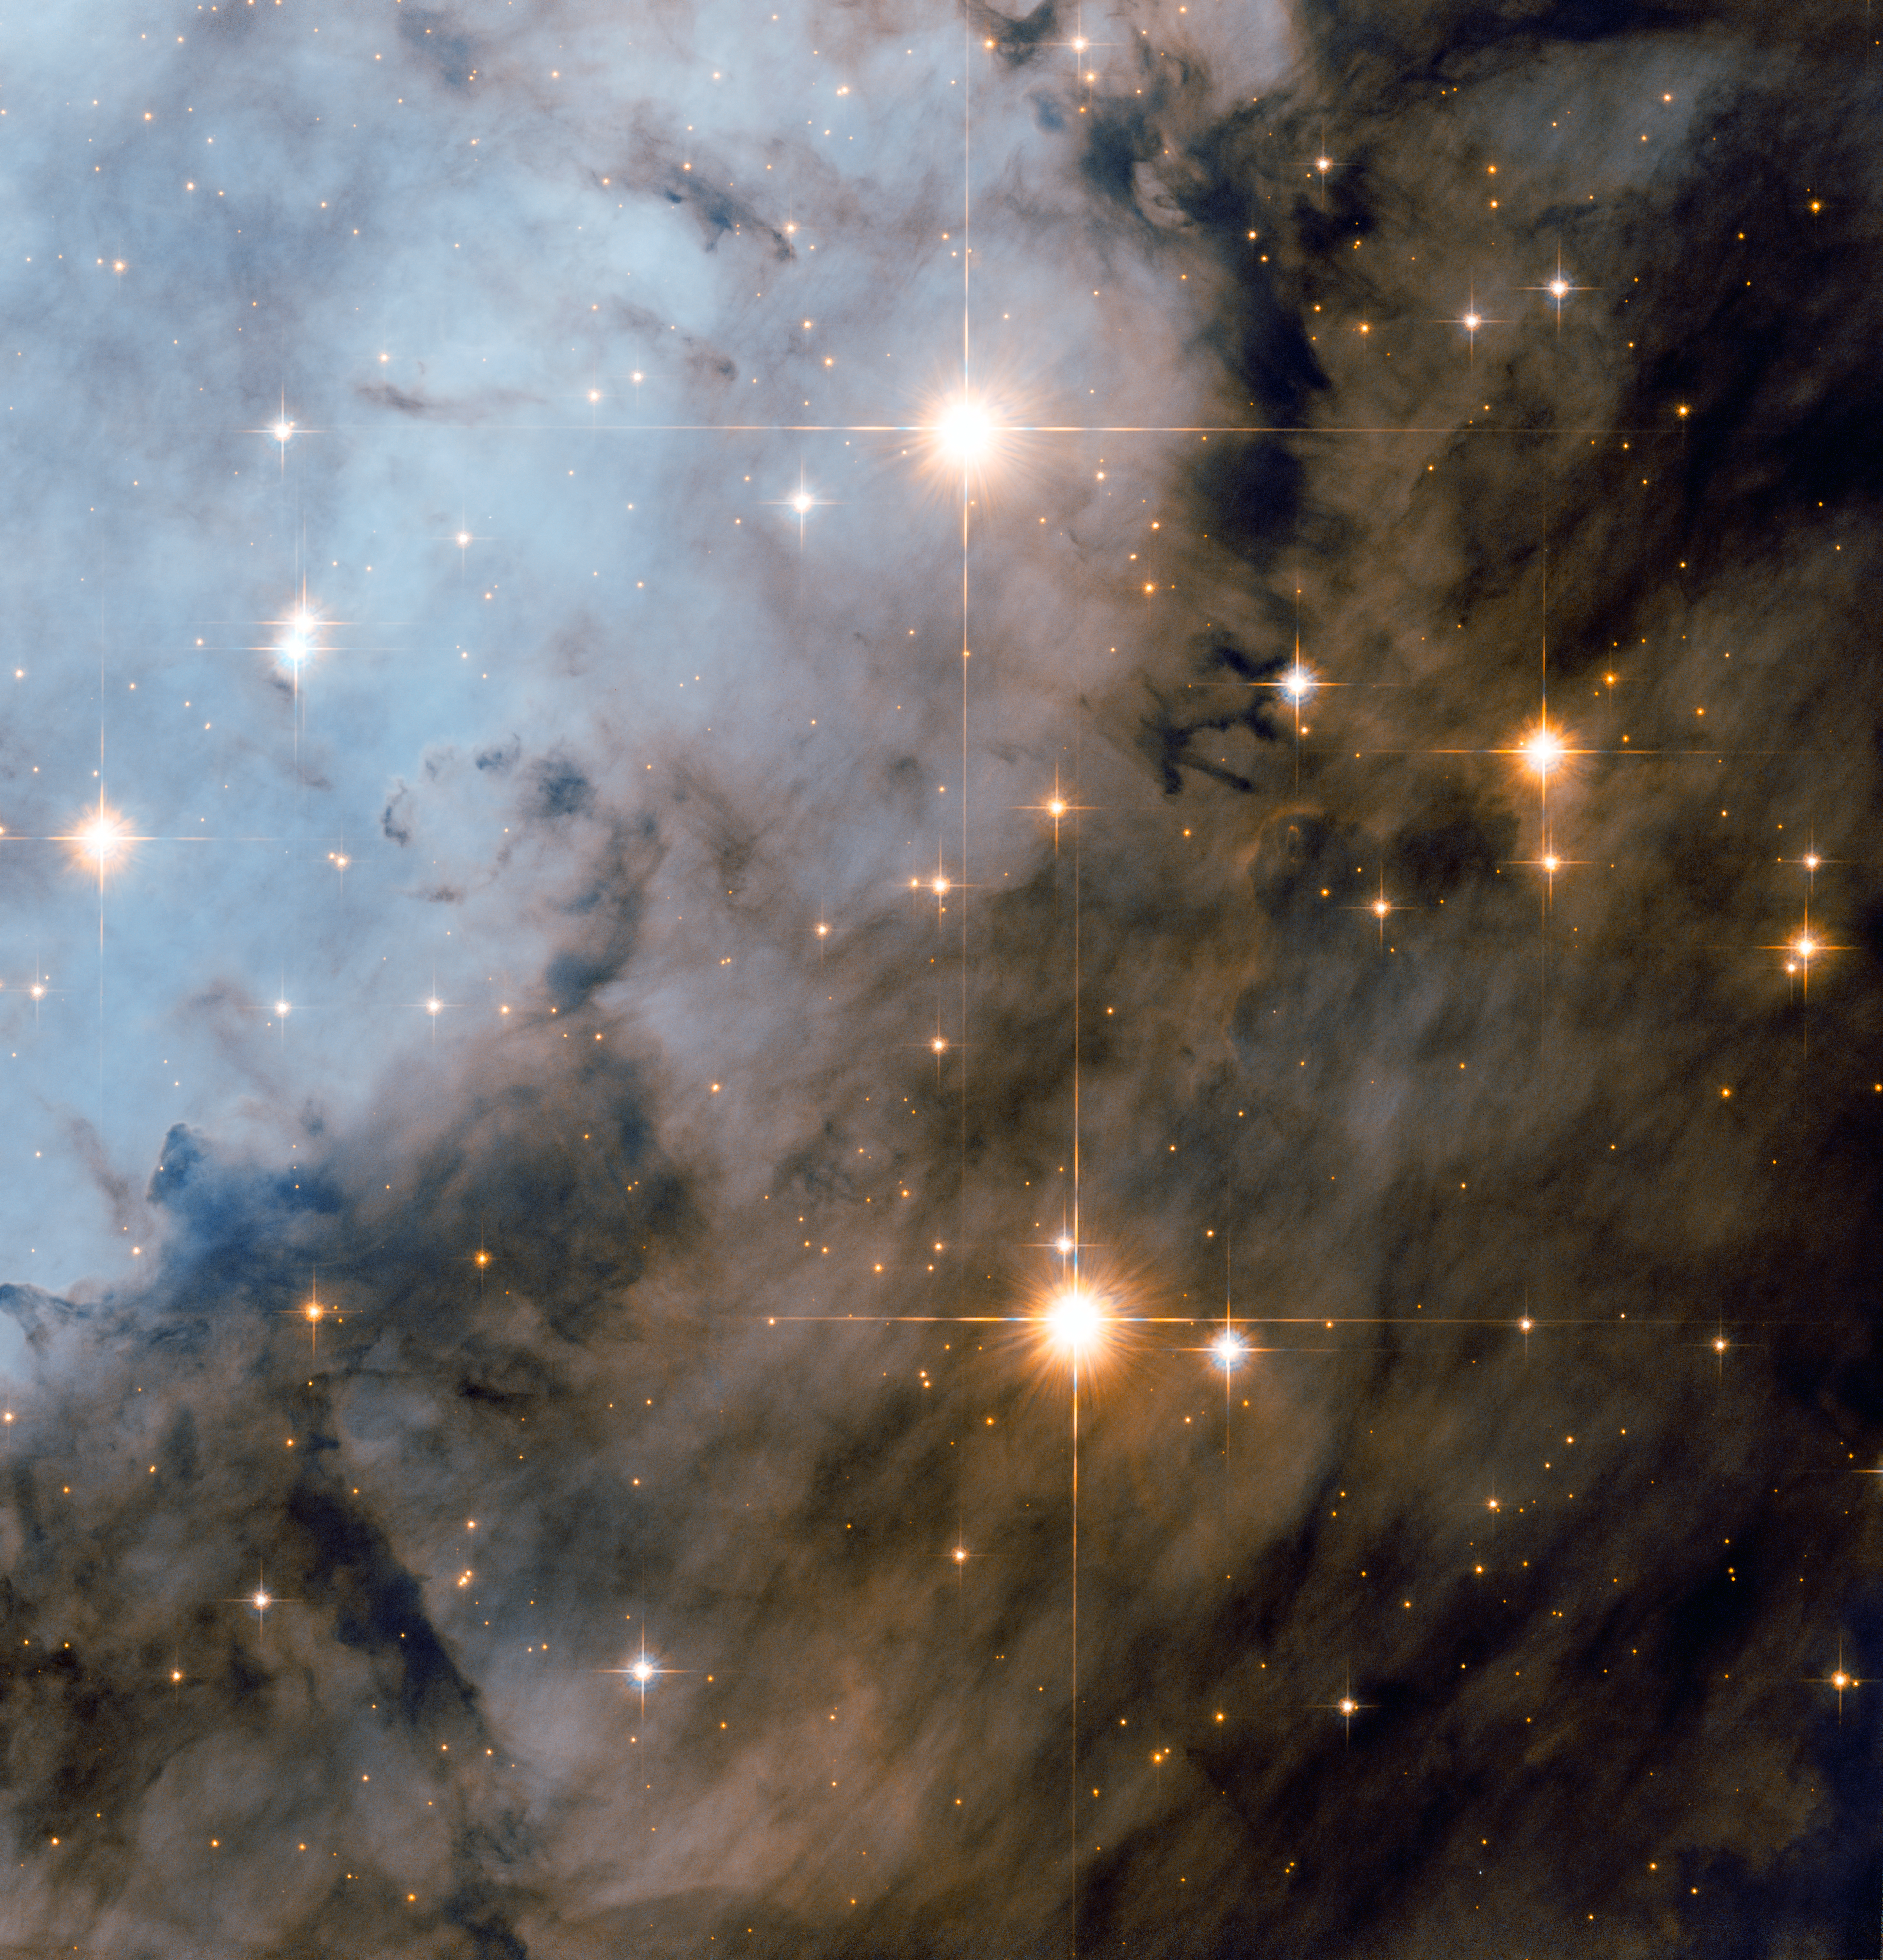

Hubble peers deeply into the Eagle Nebula

The star cluster is very bright and was discovered in the mid-eighteenth century. The nebula, however, is much more elusive and it took almost a further two decades for it to be first noted by Charles Messier in 1764. Although it is commonly known as the Eagle Nebula, its official designation is Messier 16 and the cluster is also named NGC 6611. One spectacular area of the nebula (outside the field of view) has been nicknamed “The Pillars of Creation” ever since the Hubble Space Telescope captured an iconic image of dramatic pillars of star-forming gas and dust.

The cluster and nebula are fascinating targets for small and medium-sized telescopes, particularly from a dark site free from light pollution. Messier 16 can be found within the constellation of Serpens Cauda (the Tail of the Serpent), which is sandwiched between Aquila, Sagittarius, and Ophiuchus in the heart of one of the brightest parts of the Milky Way. Small telescopes with low power are useful for observing large, but faint, swathes of the nebula, whereas 30 cm telescopes and larger may reveal the dark pillars under good conditions. But a space telescope in orbit around the Earth, like Hubble — which boasts a 2.4-metre diameter mirror and state-of-the-art instruments — is required for an image as spectacular as this one.

This picture was created from images taken with the Wide Field Channel of Hubble’s Advanced Camera for Surveys. Images through a near-infrared filter (F775W) are coloured red and images through a blue filter (F475W) are blue. The exposures times were one hour and 54 minutes respectively and the field of view is about 3.3 arcminutes across.

Credit: ESA/Hubble & NASA